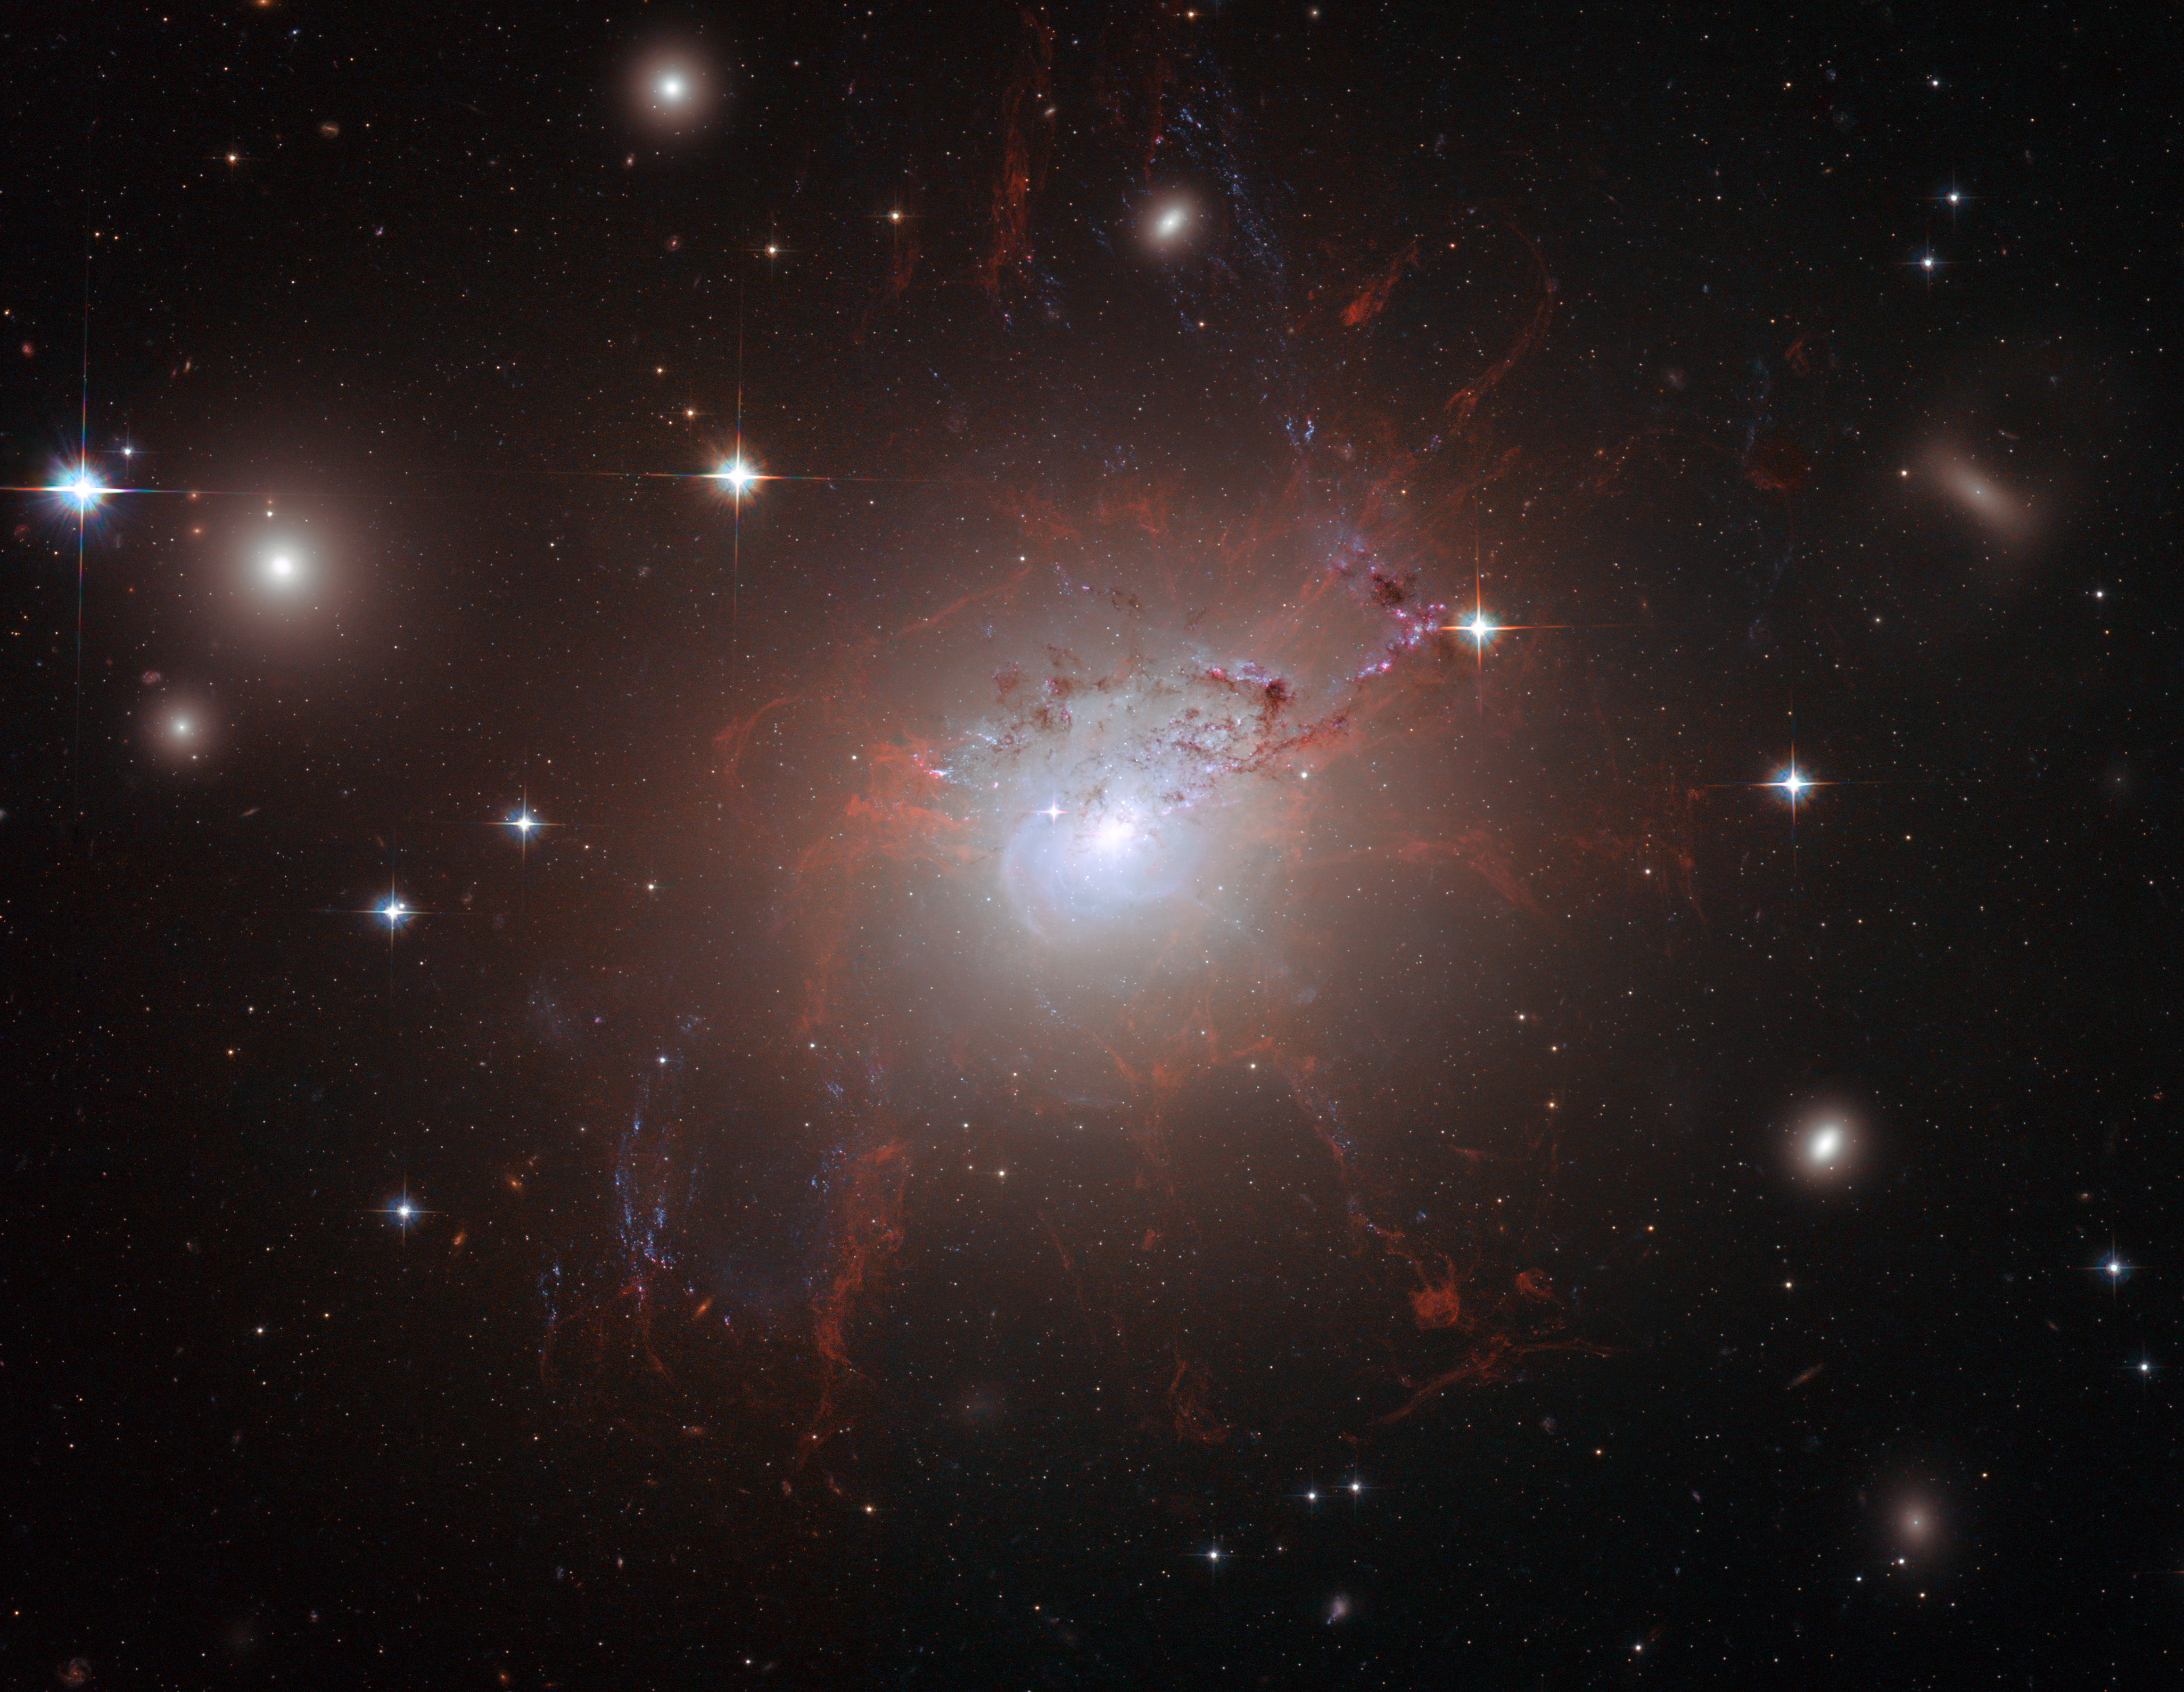

Magnetic monster NGC 1275

This stunning image of NGC 1275 was taken using the NASA/ESA Hubble Space Telescope's Advanced Camera for Surveys in July and August 2006. It provides amazing detail and resolution of the fragile filamentary structures, which show up as a reddish lacy structure surrounding the central bright galaxy NGC 1275. These filaments are cool despite being surrounded by gas that is around 55 million degrees Celsius hot. They are suspended in a magnetic field which maintains their structure and demonstrates how energy from the central black hole is transferred to the surrounding gas.

By observing the filamentary structure, astronomers were, for the first time, able to estimate the magnetic field's strength. Using this information they demonstrated how the extragalactic magnetic fields have maintained the structure of the filaments against collapse caused by either gravitational forces or the violence of the surrounding cluster during their 100-million-year lifetime.

This is the first time astronomers have been able to differentiate the individual threads making up such filaments to this degree. Astonishingly, they distinguished threads a mere 200 light-years across. By contrast, the filaments seen here can be a gaping 200 000 light-years long. The entire image is approximately 260 000 light-years across.

Also seen in the image are impressive lanes of dust from a separate spiral galaxy. It lies partly in front of the giant elliptical central cluster galaxy and has been completed disrupted by the tidal gravitational forces within the galaxy cluster. Several striking filaments of blue newborn stars are seen crossing the image.

Credit: NASA, ESA and Andy Fabian (University of Cambridge, UK)